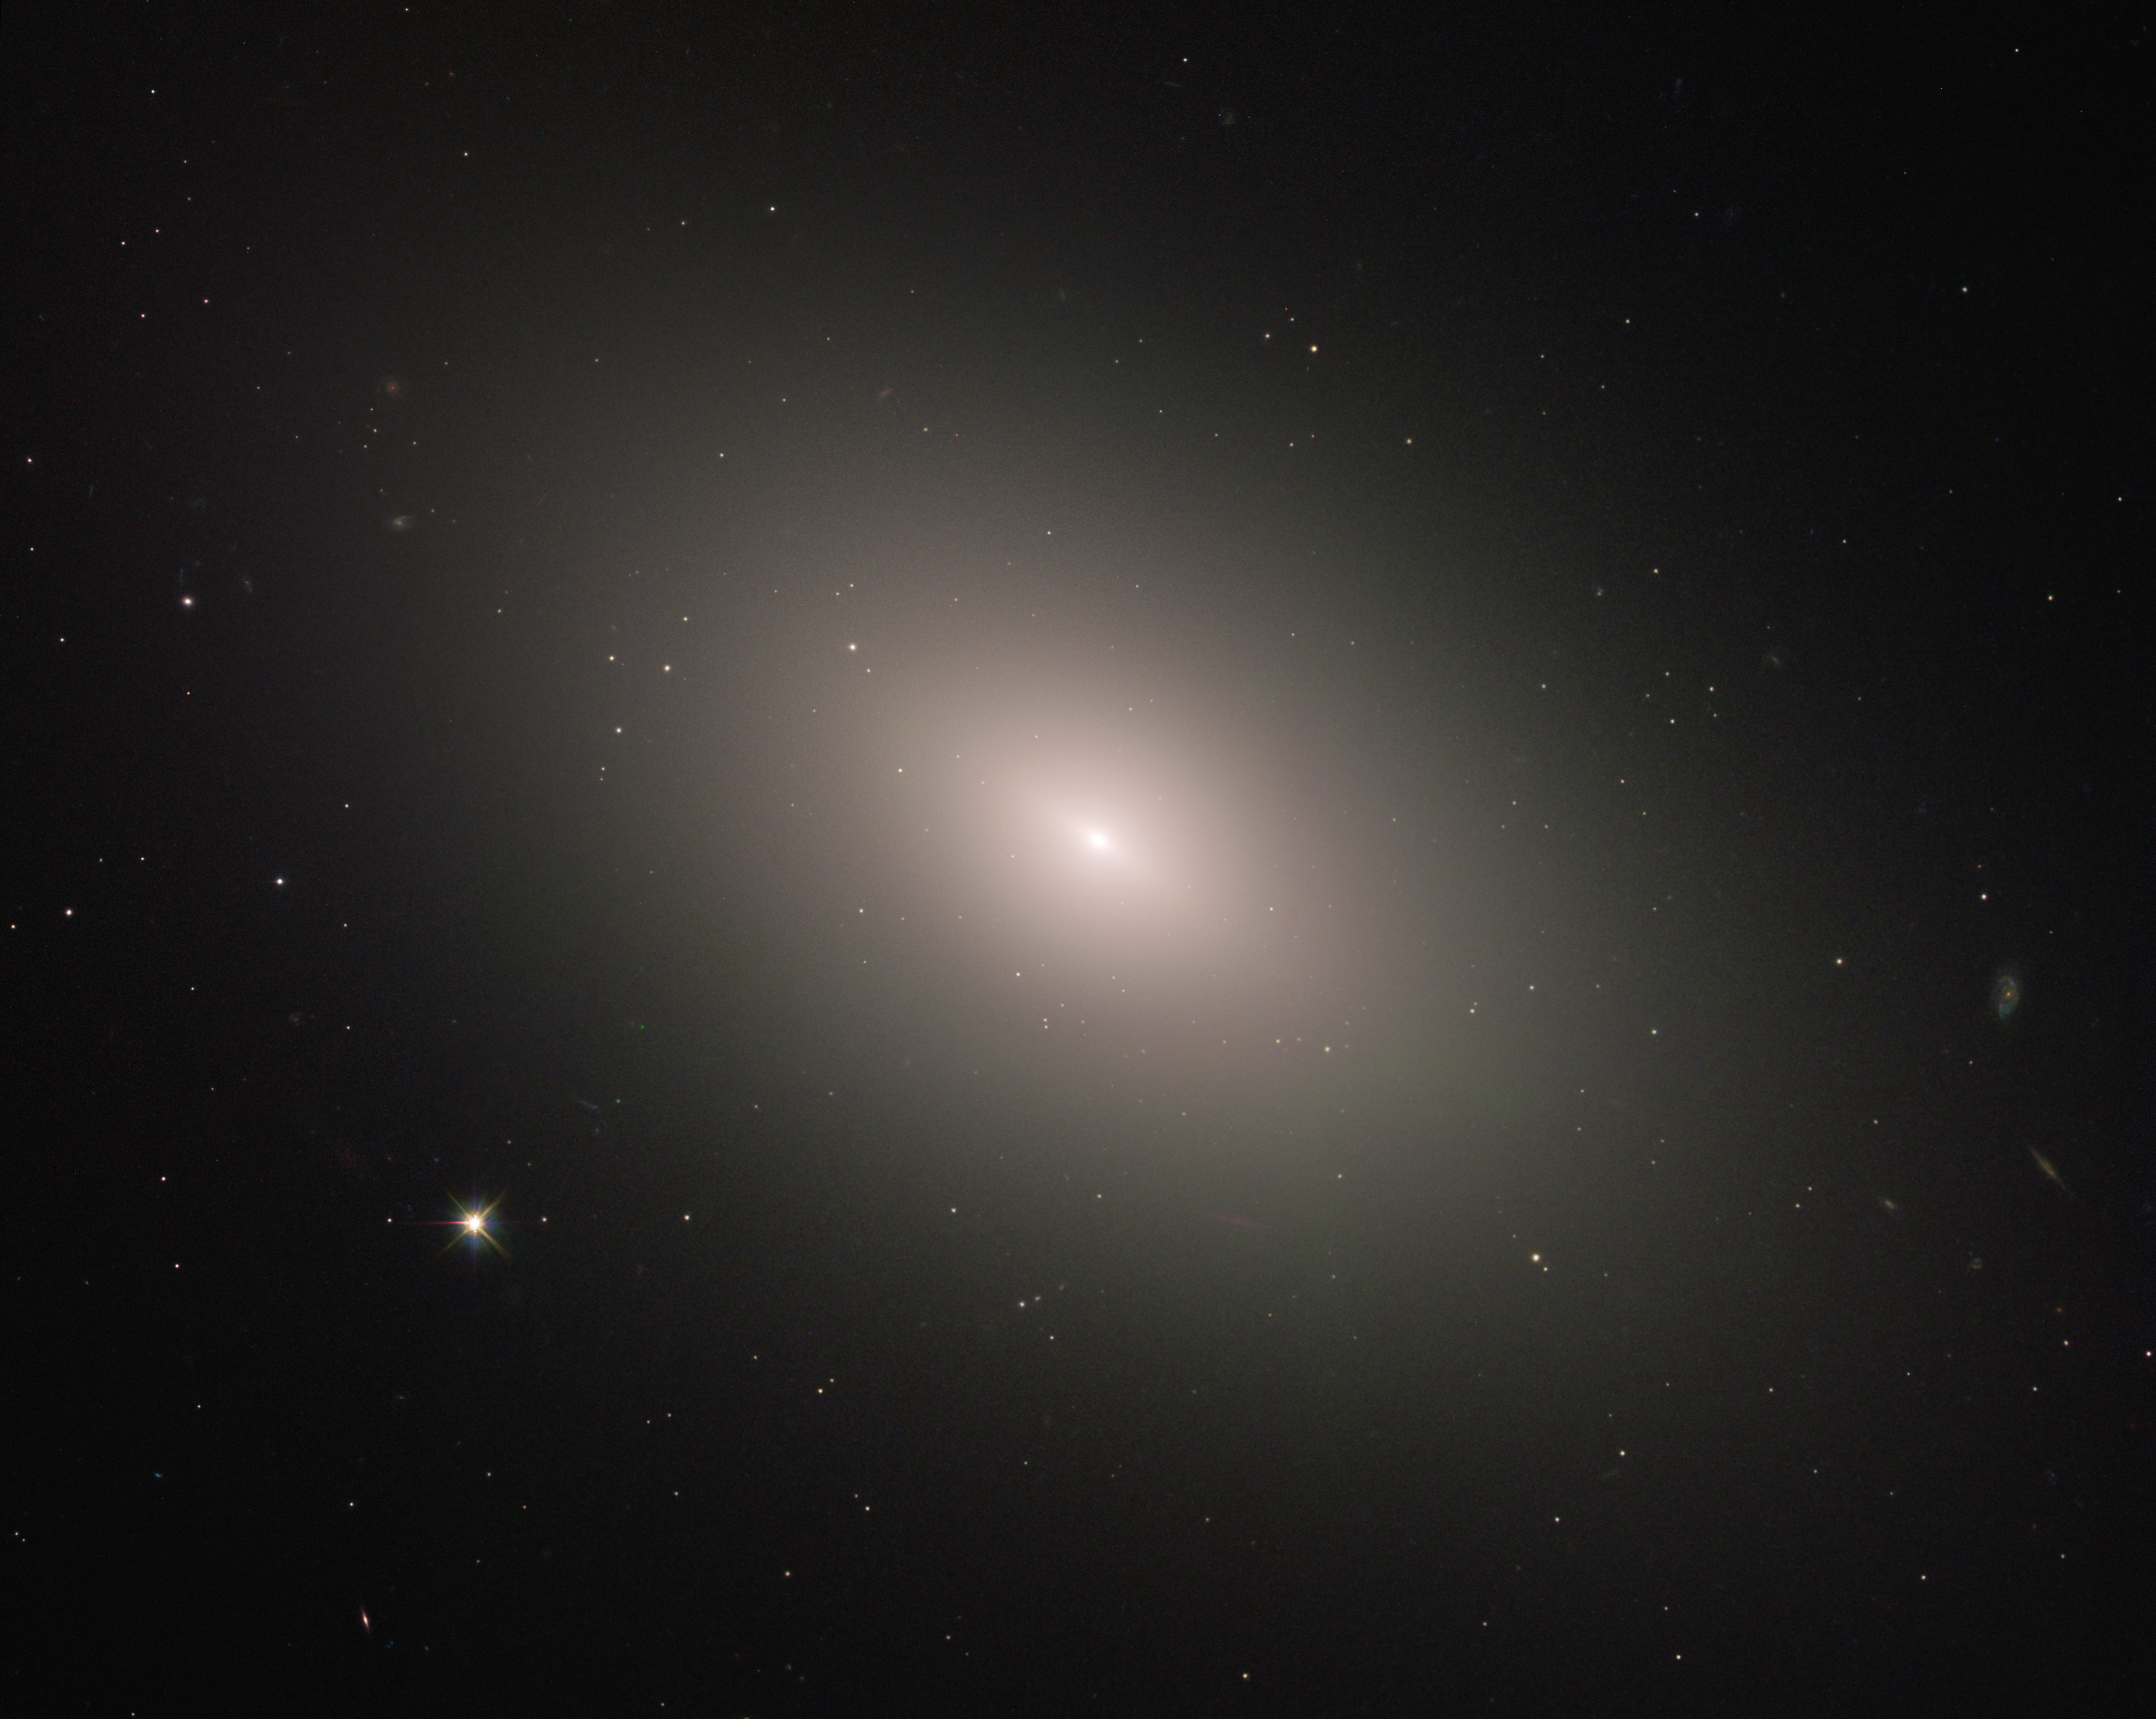

Bucking the trend

This luminous orb is the galaxy NGC 4621, better known as Messier 59. As this latter moniker indicates, the galaxy was listed in the famous catalogue of deep-sky objects compiled by French comet-hunter Charles Messier in 1779. However, German astronomer Johann Gottfried Koehler is credited with discovering the galaxy just days before Messier added it to his collection.

Modern observations show that Messier 59 is an elliptical galaxy, one of the three main kinds of galaxies along with spirals and irregulars. Ellipticals tend to be the most evolved of the trio, full of old, red stars and exhibiting little or no new star formation. Messier 59, however, bucks this trend somewhat; the galaxy does show signs of star formation, with some newborn stars residing within a disc near the core.

Located in the 2000-strong Virgo Cluster of galaxies within the constellation of Virgo (The Virgin), Messier 59 lies approximately 50 million light-years away from us. This image was taken by the NASA/ESA Hubble Space Telescope’s Advanced Camera for Surveys.

Credit: ESA/Hubble & NASA, P. Cote